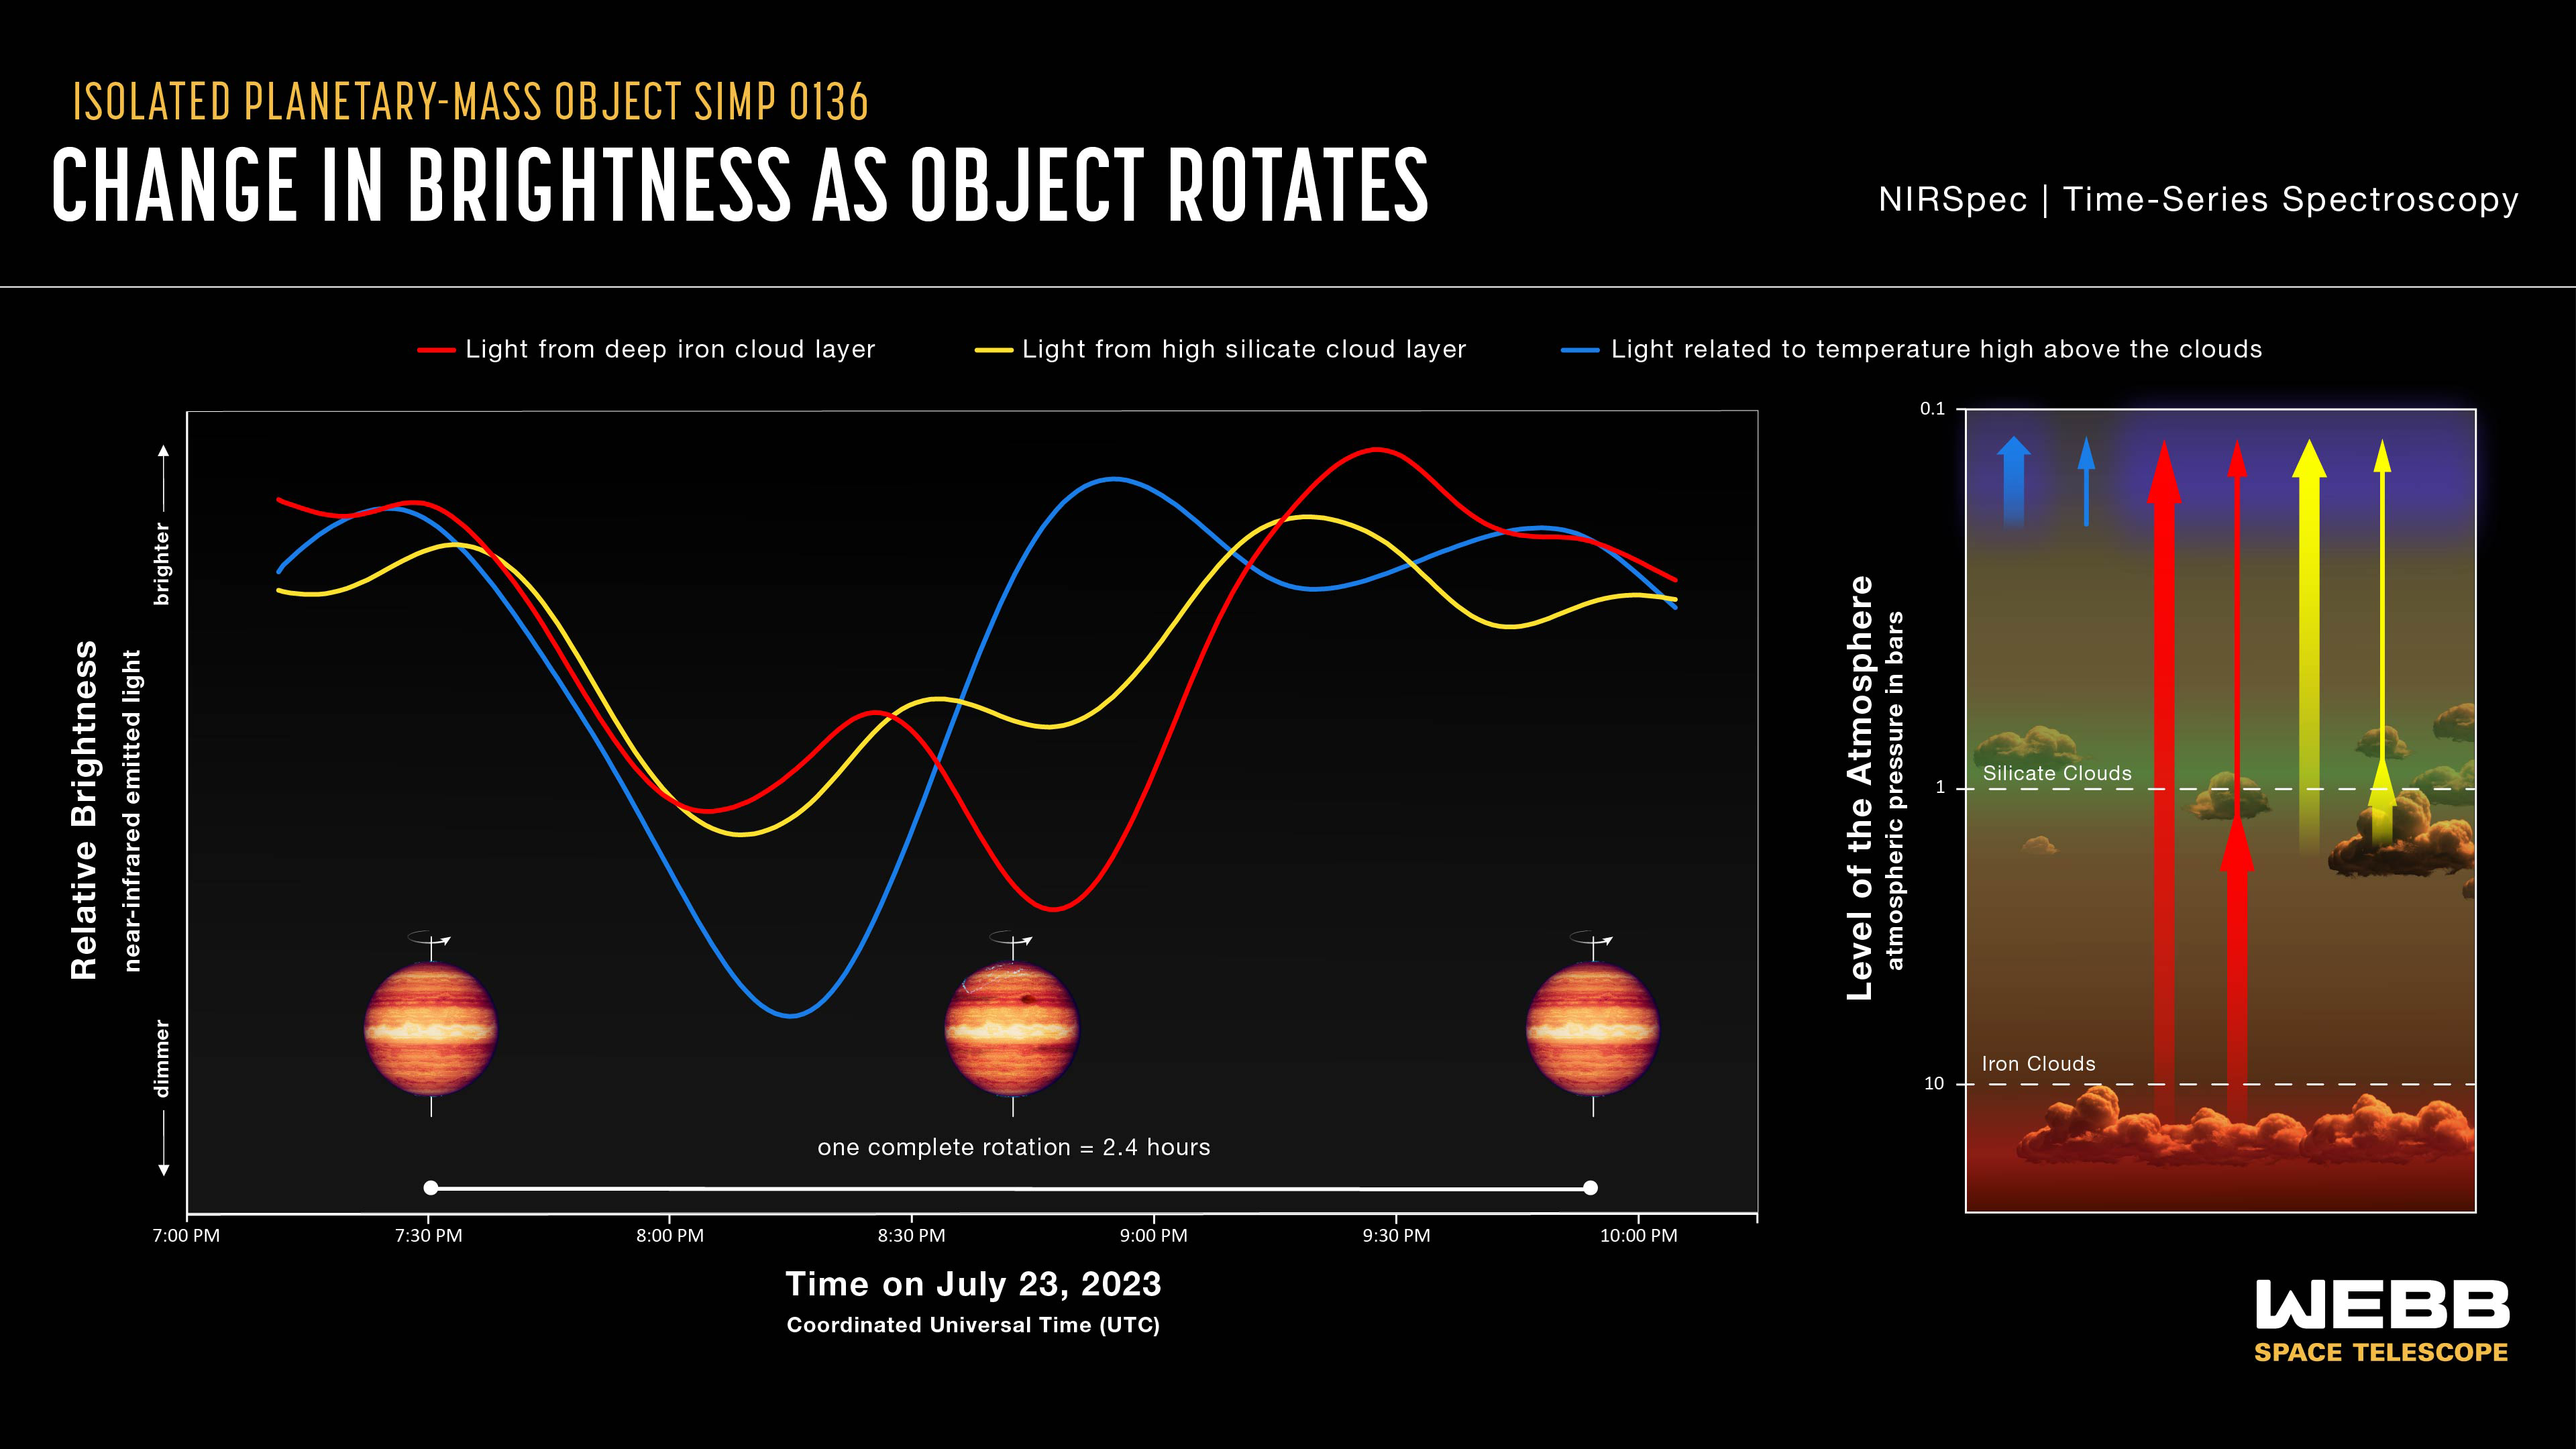

Isolated planetary-mass object SIMP 0136 (NIRSpec light curves)

These light curves show the change in brightness of three different sets of wavelengths (colors) of near-infrared light coming from the isolated planetary-mass object SIMP 0136 as it rotated. The light was captured by Webb’s NIRSpec (Near-Infrared Spectrograph), which collected a total of 5,726 spectra — one every 1.8 seconds — over the course of about 3 hours on 23 July 2023 (SIMP 0136 completes one rotation every 2.4 hours).

By comparing these light curves to models, researchers were able to show that each set of wavelengths probes different depths (pressures) in the atmosphere.

The curve shown in red tracks the brightness of 0.9- to 1.4-micron light thought to originate deep in the atmosphere at a pressure of about 10 bars (about 10 times the air pressure at sea level on Earth), within clouds made of iron particles. The curve shown in yellow tracks the brightness of 1.4- to 2.3-micron light from a pressure of about 1 bar within higher clouds made of tiny grains of silicate minerals. The variations in brightness shown by these two curves is related to patchiness of the cloud layers, which emit some wavelengths of light and absorb others.

The curve shown in blue tracks the brightness of 3.3- to 3.6-micron light that originates high above the clouds at a pressure of about 0.1 bars. Changes in brightness of these wavelengths are related to variations in temperature around the object. Bright “hot spots” could be related to auroras that have been detected at radio wavelengths, or to upwelling of hot gas from deeper in the atmosphere.

The differences in shape of these three light curves show that there are complex variations in SIMP 0136’s atmosphere with depth as well as longitude. If the atmosphere varied around the object in the same way at all depths, the light curves would have similar patterns. If it varied with depth, but not longitude, the light curves would be straight, flat lines.

Note this graph shows the relative change in brightness for each given set of wavelengths over time, not the difference in absolute brightness between the different sets. At any given time, there is more light coming from the deep atmosphere (red light curve) than from the upper atmosphere (blue light curve).

SIMP 0136 is located within the Milky Way, about 20 light-years from Earth, in the constellation Pisces. It is the brightest isolated planet or brown dwarf visible from the Northern Hemisphere, and is thought to be about 200 million years old. The artist’s concepts are based on spectroscopic observations. Webb has not captured a direct image of the object.

Credit: NASA, ESA, CSA, J. Olmsted (STScI)